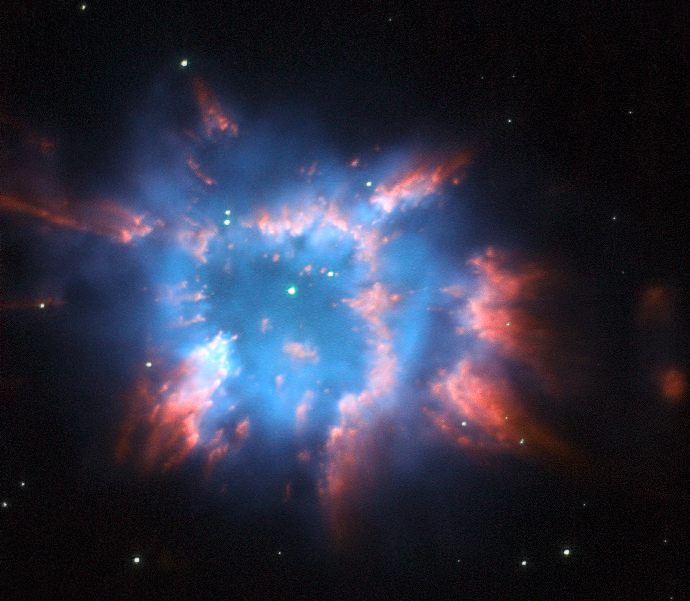

A star's colourful final splash

The Hubble Space Telescope captured this beautiful image of NGC 6326, a planetary nebula with glowing wisps of outpouring gas that are lit up by a central star nearing the end of its life. When a star ages and the red giant phase of its life comes to an end, it starts to eject layers of gas from its surface leaving behind a hot and compact white dwarf. Sometimes this ejection results in elegantly symmetric patterns of glowing gas, but NGC 6326 is much less structured. This object is located in the constellation of Ara, the Altar, about 11 000 light-years from Earth.

Planetary nebulae are one of the main ways in which elements heavier than hydrogen and helium are dispersed into space after their creation in the hearts of stars. Eventually some of this outflung material may form new stars and planets. The vivid red and blue hues in this image come from the material glowing under the action of the fierce ultraviolet radiation from the still hot central star.

This picture was created from images taken using the Hubble Space Telescope’s Wide Field Planetary Camera 2. The red light was captured through a filter letting through the glow from hydrogen gas (F658N). The blue glow comes from ionised oxygen and was recorded through a green filter (F502N). The green layer of the image, which shows the stars well, was taken through a broader yellow filter (F555W). The total exposure times were 1400 s, 360 s and 260 s respectively. The field of view is about 30 arcseconds across.

Credit: ESA/Hubble and NASA